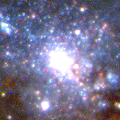

Close-Up of Star Formation in Antennae Galaxy

The collision triggers the birth of new stars in brilliant blue star clusters, the brightest of which contains roughly a million stars. The star clusters are blue because they are very young, the youngest being only a few million years old, a mere blink of the eye on the astronomical time scale.

Credit: Brad Whitmore (STScI), and NASA/ESA